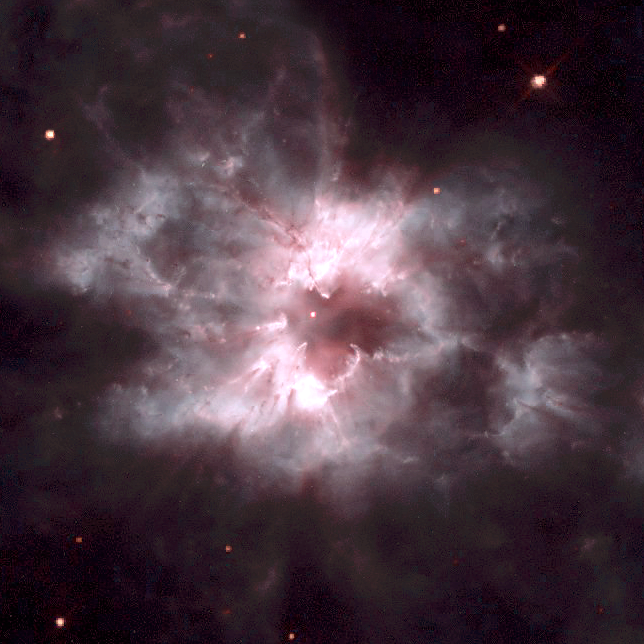

NGC 2440

NGC 2440 is another planetary nebula ejected by a dying star, but it has a much more chaotic structure than NGC 2346. The central star of NGC 2440 is one of the hottest known, with a surface temperature near 200,000 degrees Celsius. The complex structure of the surrounding nebula suggests to some astronomers that there have been periodic oppositely directed outflows from the central star, somewhat similar to that in NGC2346, but in the case of NGC 2440 these outflows have been episodic, and in different directions during each episode. The nebula is also rich in clouds of dust, some of which form long, dark streaks pointing away fromthe central star. In addition to the bright nebula, which glows becauseof fluorescence due to ultraviolet radiation from the hot star, NGC 2440 is surrounded by a much larger cloud of cooler gas which is invisible in ordinary light but can be detected with infrared telescopes. NGC 2440 lies about 4,000 light-years from Earth in thedirection of the constellation Puppis.

The Hubble Heritage team made this image from observations of NGC 2440acquired by Howard Bond (STScI) and Robin Ciardullo (Penn State).

Credit: NASA/ESA and The Hubble Heritage Team (AURA/STScI).